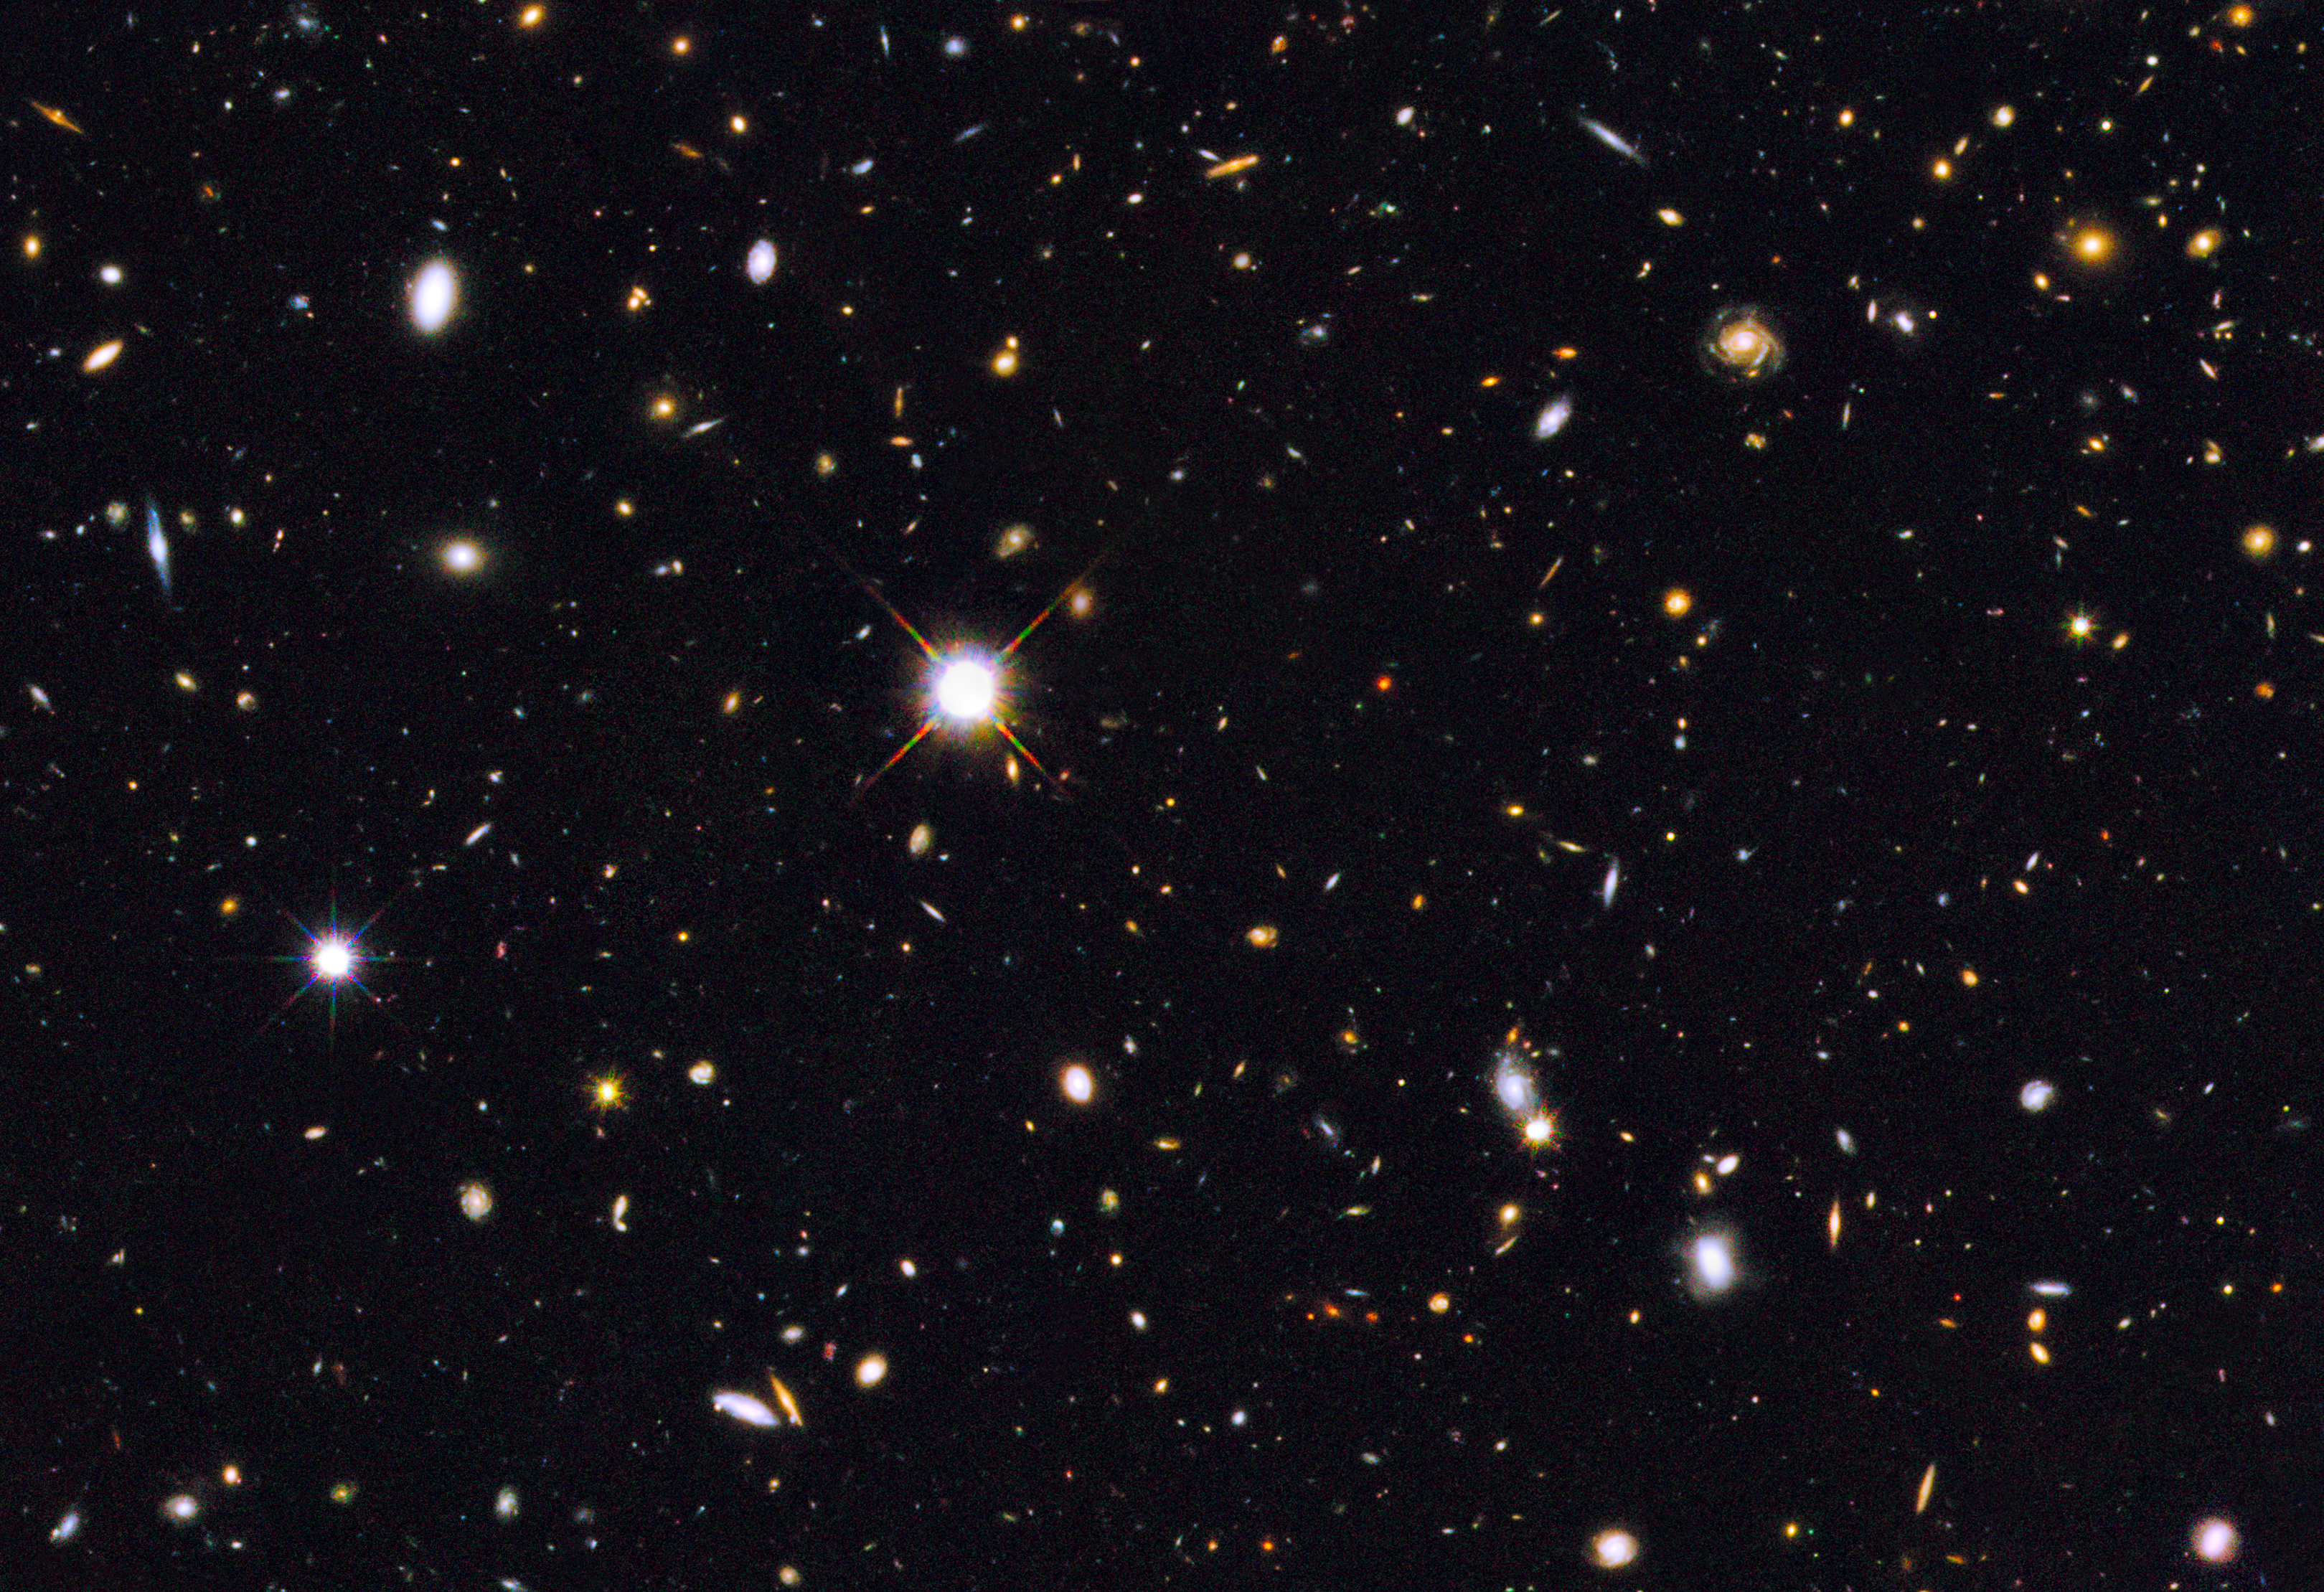

Section of Hubble GOODS North field

This image is from the NASA/ESA Hubble Space Telescope survey GOODS North (Great Observatories Origins Deep Survey). The image is aglow with galaxies but to the bottom right, highlighted in the annotated image, is a galaxy of particular interest.

A compact galactic core dubbed GOODS-N-774 and the first galaxy spotted in this stage of formation — a very early stage where the dense galactic core is still furiously churning out newborn stars.

Credit: NASA, ESA, and E. Nelson (Yale University, USA)